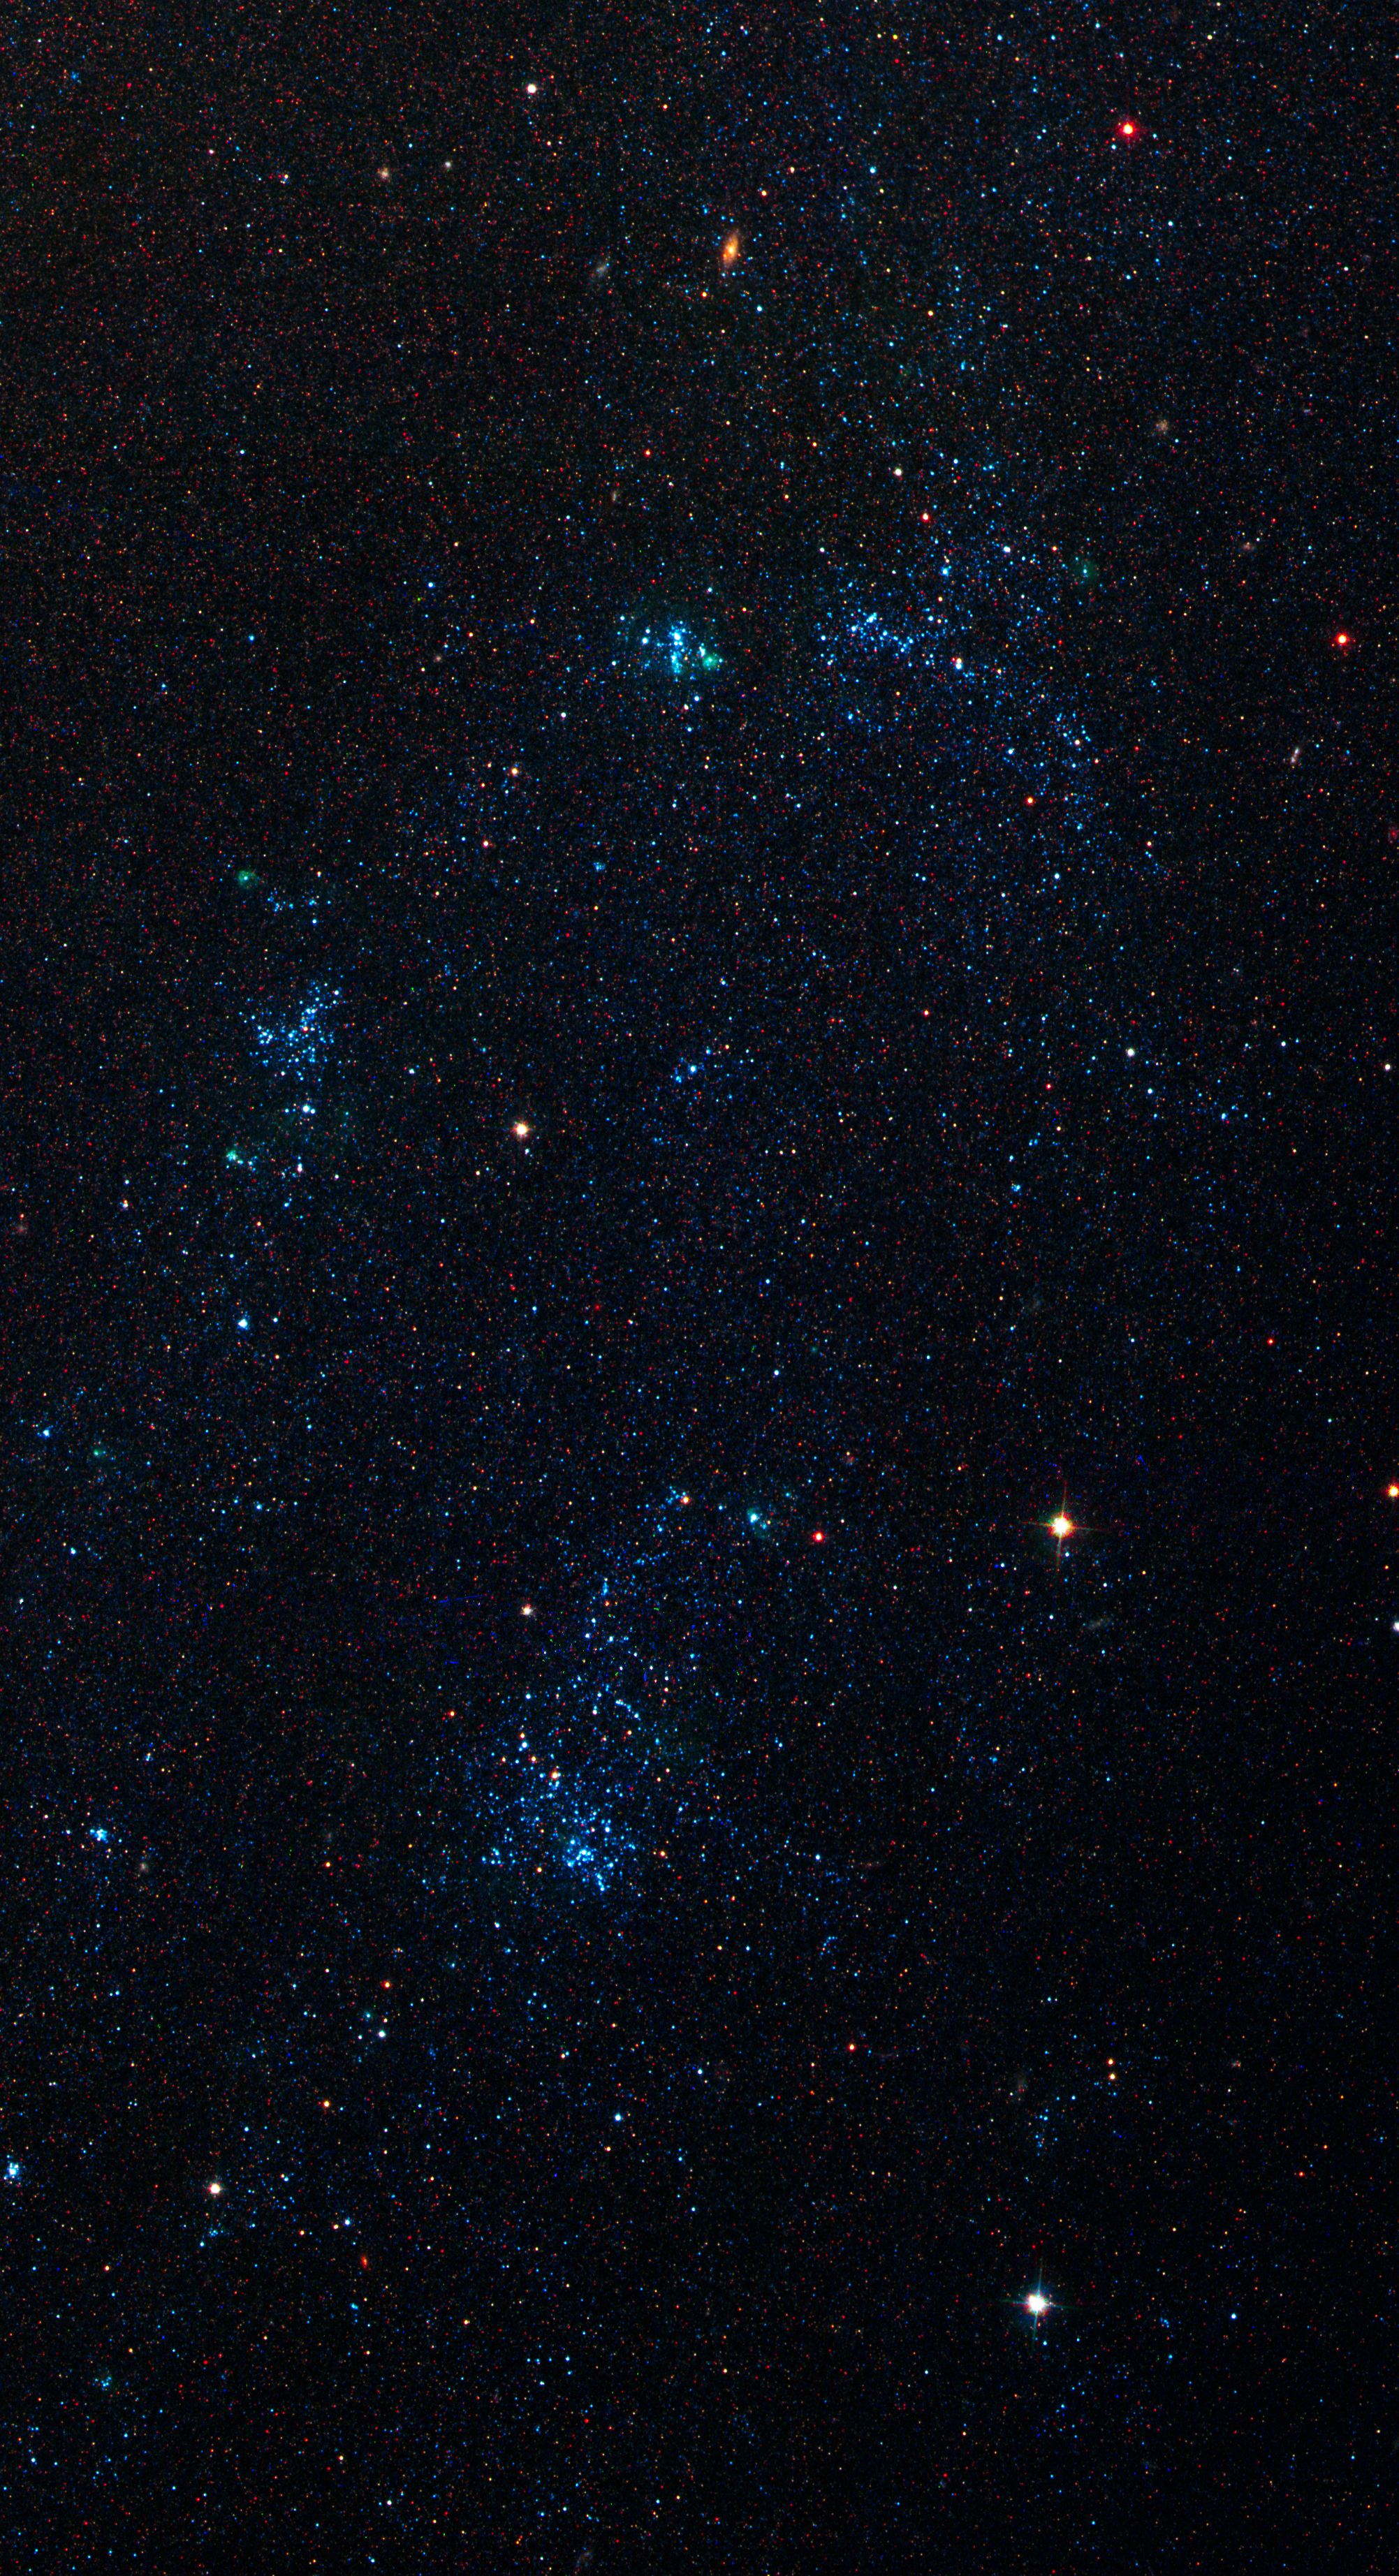

Spiral Galaxy M81 Details 3.

OB Associations in outer northern arm of M81.

Credit: NASA, ESA and the Hubble Heritage Team (STScI/AURA). Acknowledgment: A. Zezas and J. Huchra (Harvard-Smithsonian Center for Astrophysics)